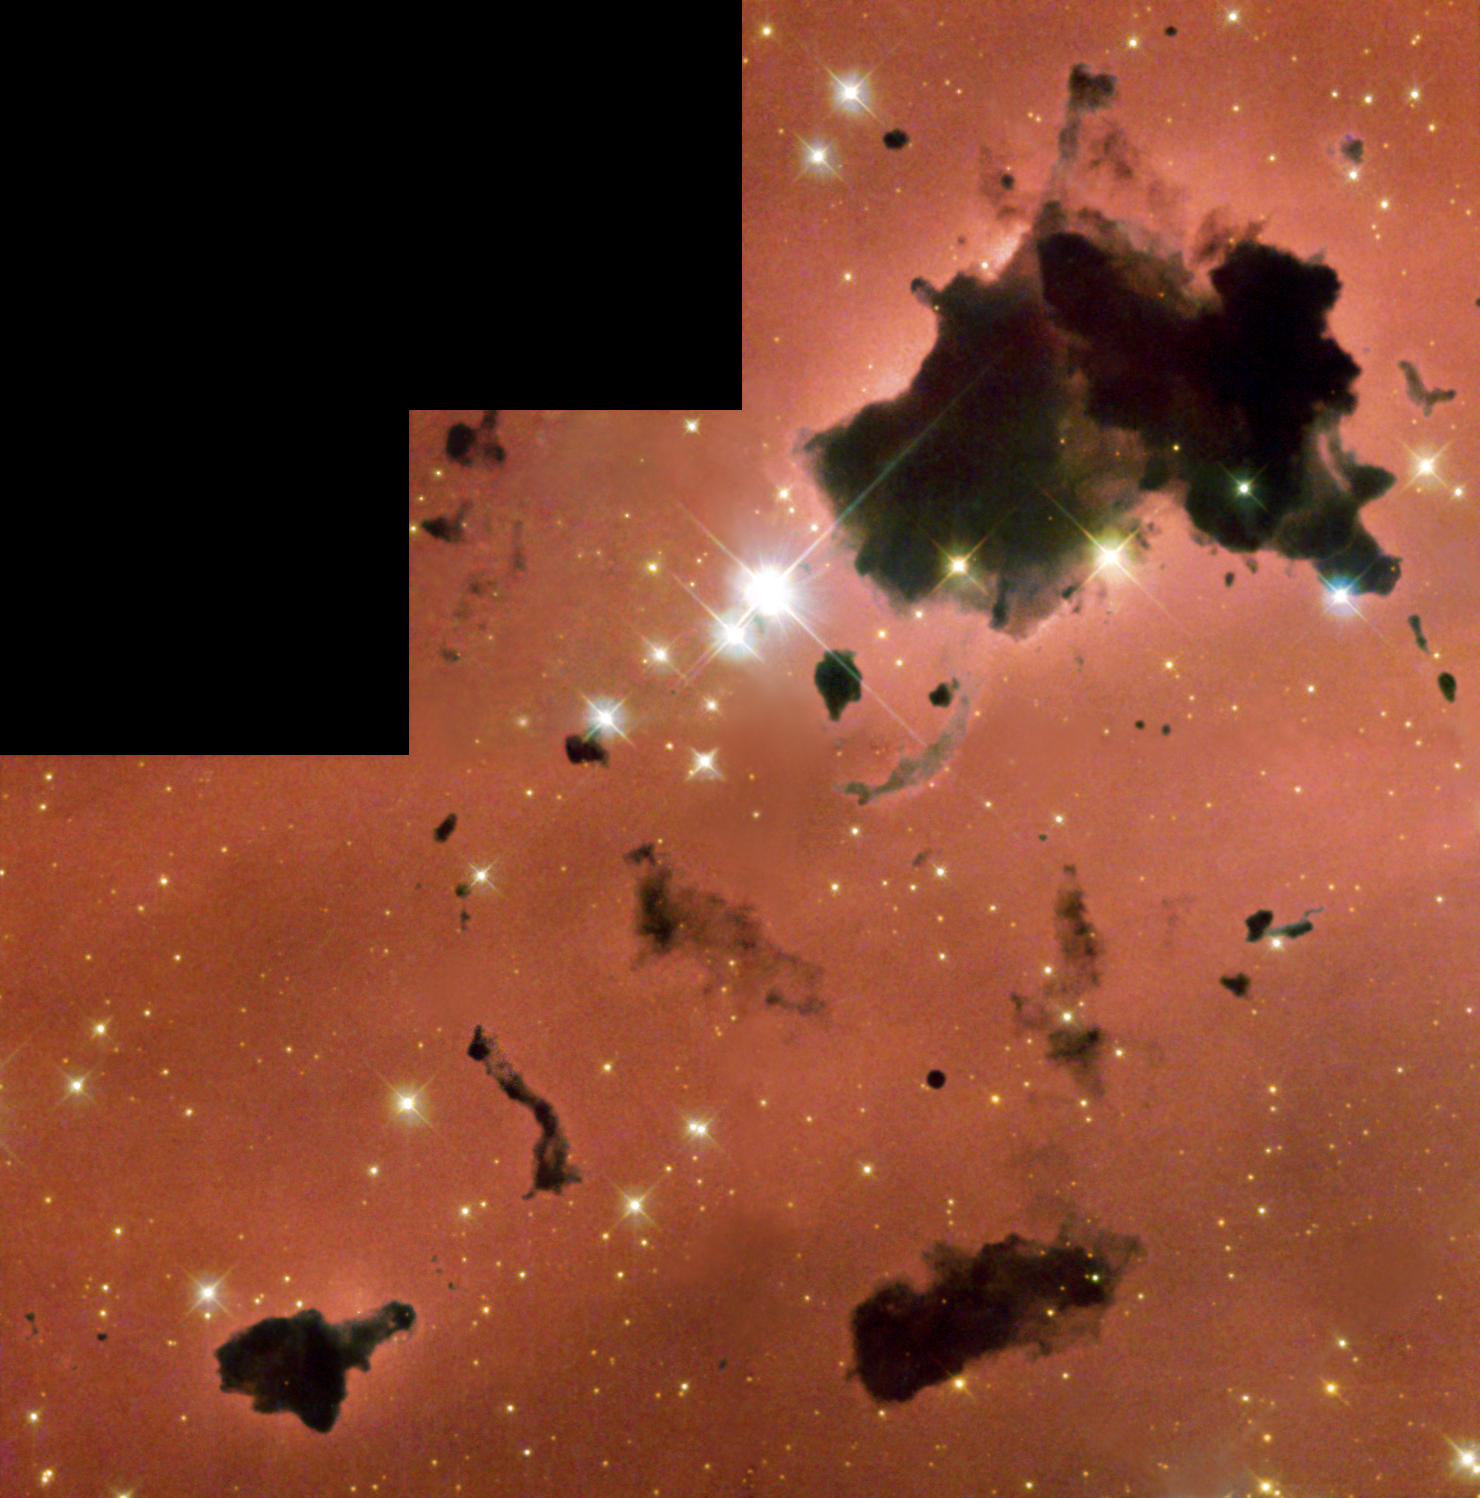

Thackeray's globules in IC 2944

Strangely glowing dark clouds float serenely in this remarkable and beautiful image taken with the Hubble Space Telescope. These dense, opaque dust clouds - known as 'globules' - are silhouetted against nearby bright stars in the busy star-forming region, IC 2944.

Astronomer A.D. Thackeray first spied the globules in IC 2944 in 1950. Globules like these have been known since Dutch-American astronomer Bart Bok first drew attention to such objects in 1947.

But astronomers still know very little about their origin and nature, except that they are generally associated with areas of star formation, called 'HII regions' due to the presence of hydrogen gas. IC 2944 is filled with gas and dust that is illuminated and heated by a loose cluster of massive stars. These stars are much hotter and much more massive than our Sun.

Credit: NASA/ESA and The Hubble Heritage Team (STScI/AURA)